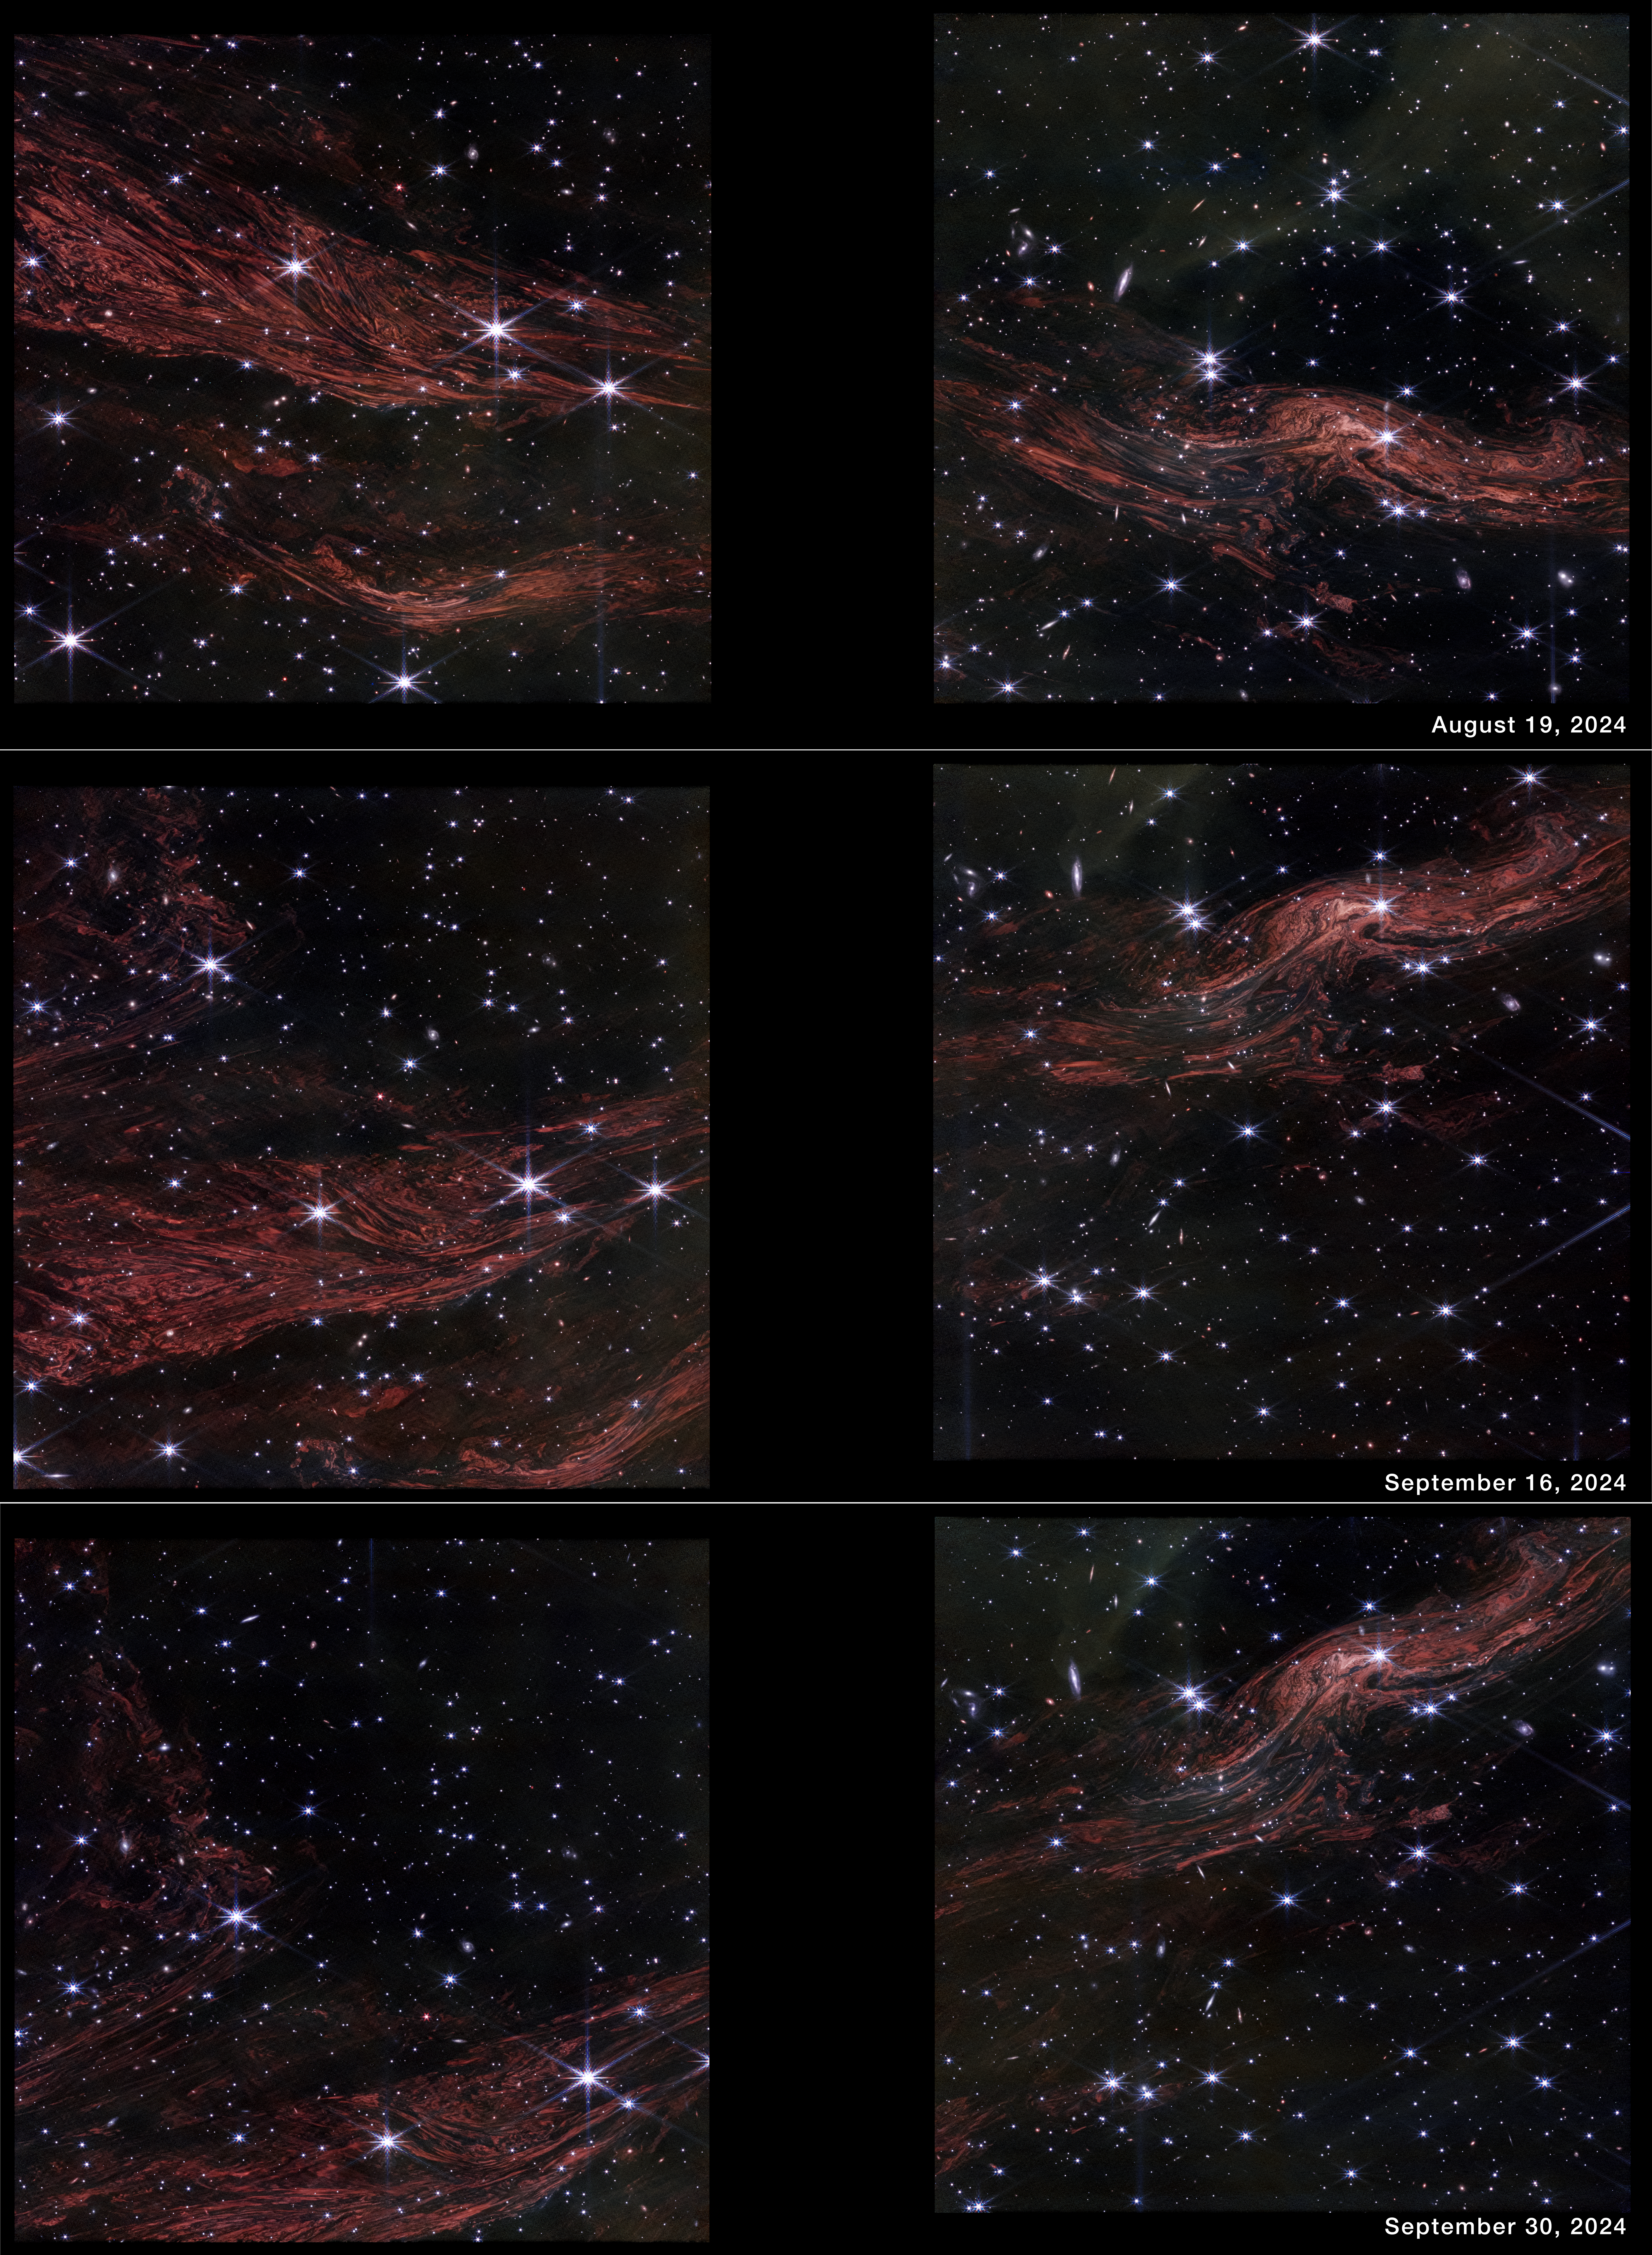

Light echoes near Cassiopeia A

These shimmering cosmic curtains show interstellar gas and dust that has been heated by the flashbulb explosion of a long-ago supernova. The gas then glows infrared light in what is known as a thermal light echo. As the supernova illumination travels through space at the speed of light, the echo appears to expand. The NASA/ESA/CSA James Webb Space Telescope observed this light echo in the vicinity of the supernova remnant Cassiopeia A three separate times, in essence creating a 3D scan of the interstellar material.

Credit: NASA, ESA, CSA, STScI, J. Jencson (IPAC-Caltech)